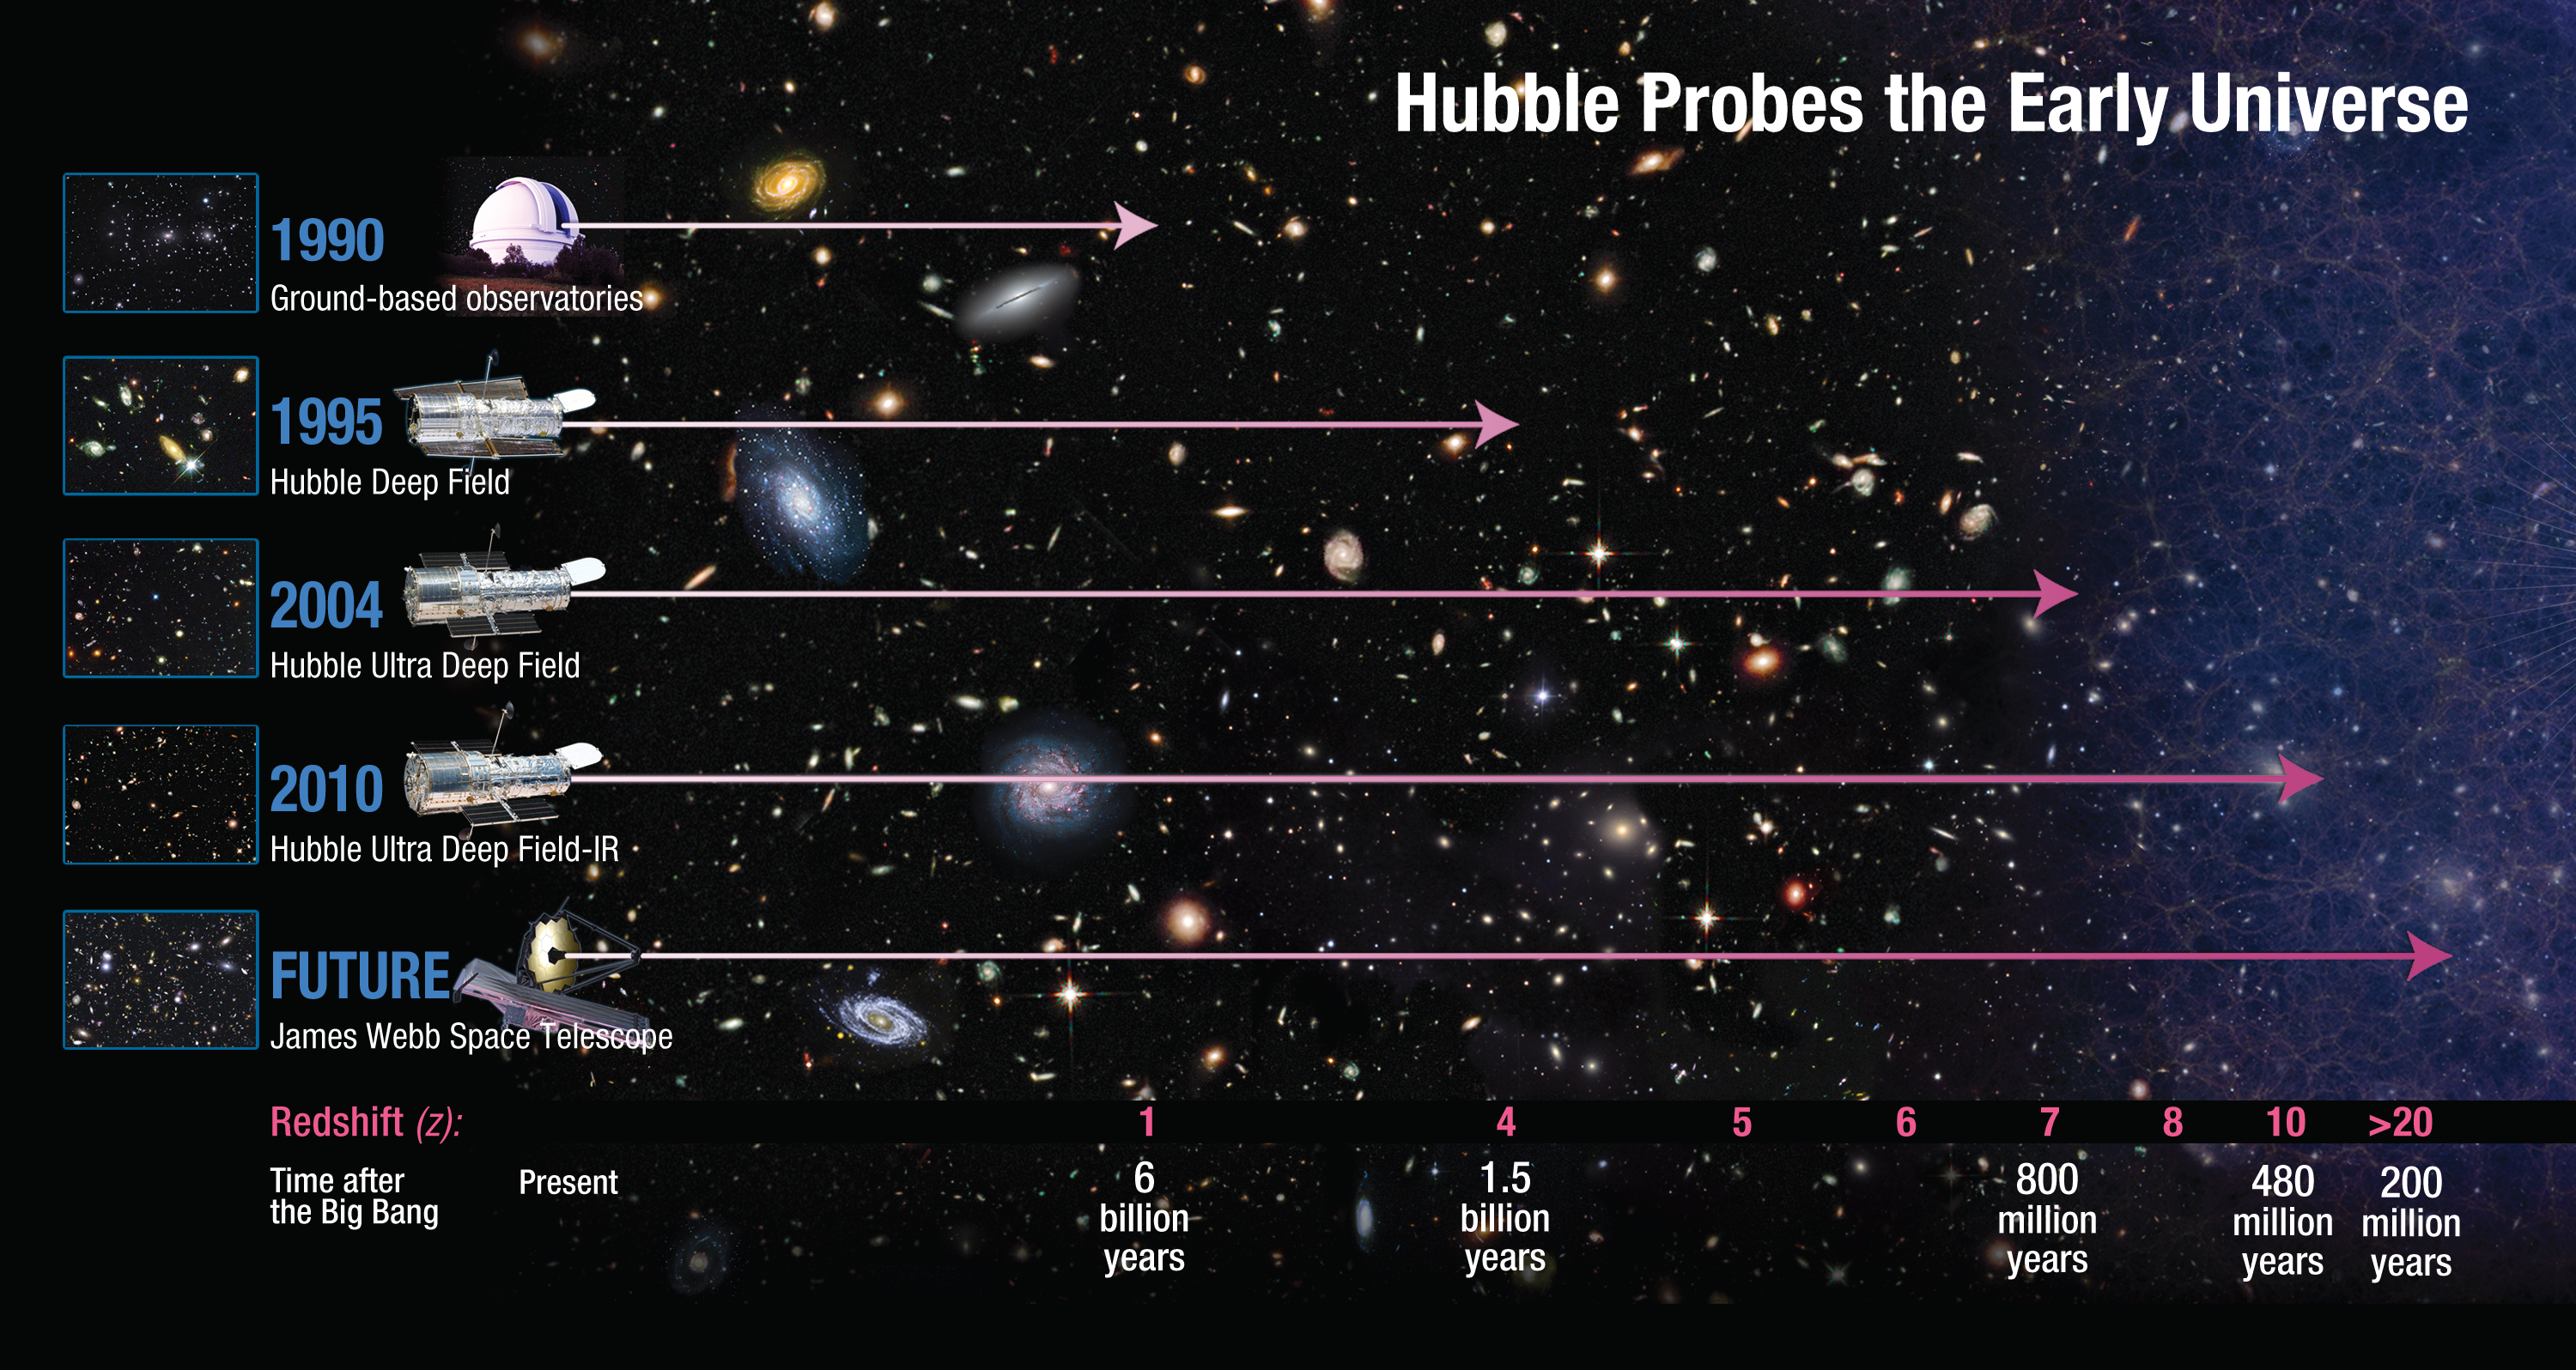

How far does Hubble see?

This diagram shows how Hubble has revolutionised the study of the distant, early Universe. Before Hubble was launched, ground-based telescopes were able to observe up to a redshift of around 1, about half way back through cosmic history. Hubble’s latest instrument, Wide Field Camera 3 has identified a candidate galaxy at a redshift of 10 — around 96 per cent of the way back to the Big Bang. The forthcoming NASA/ESA/CSA James Webb Space Telescope will see further still.

Credit: NASA, ESA